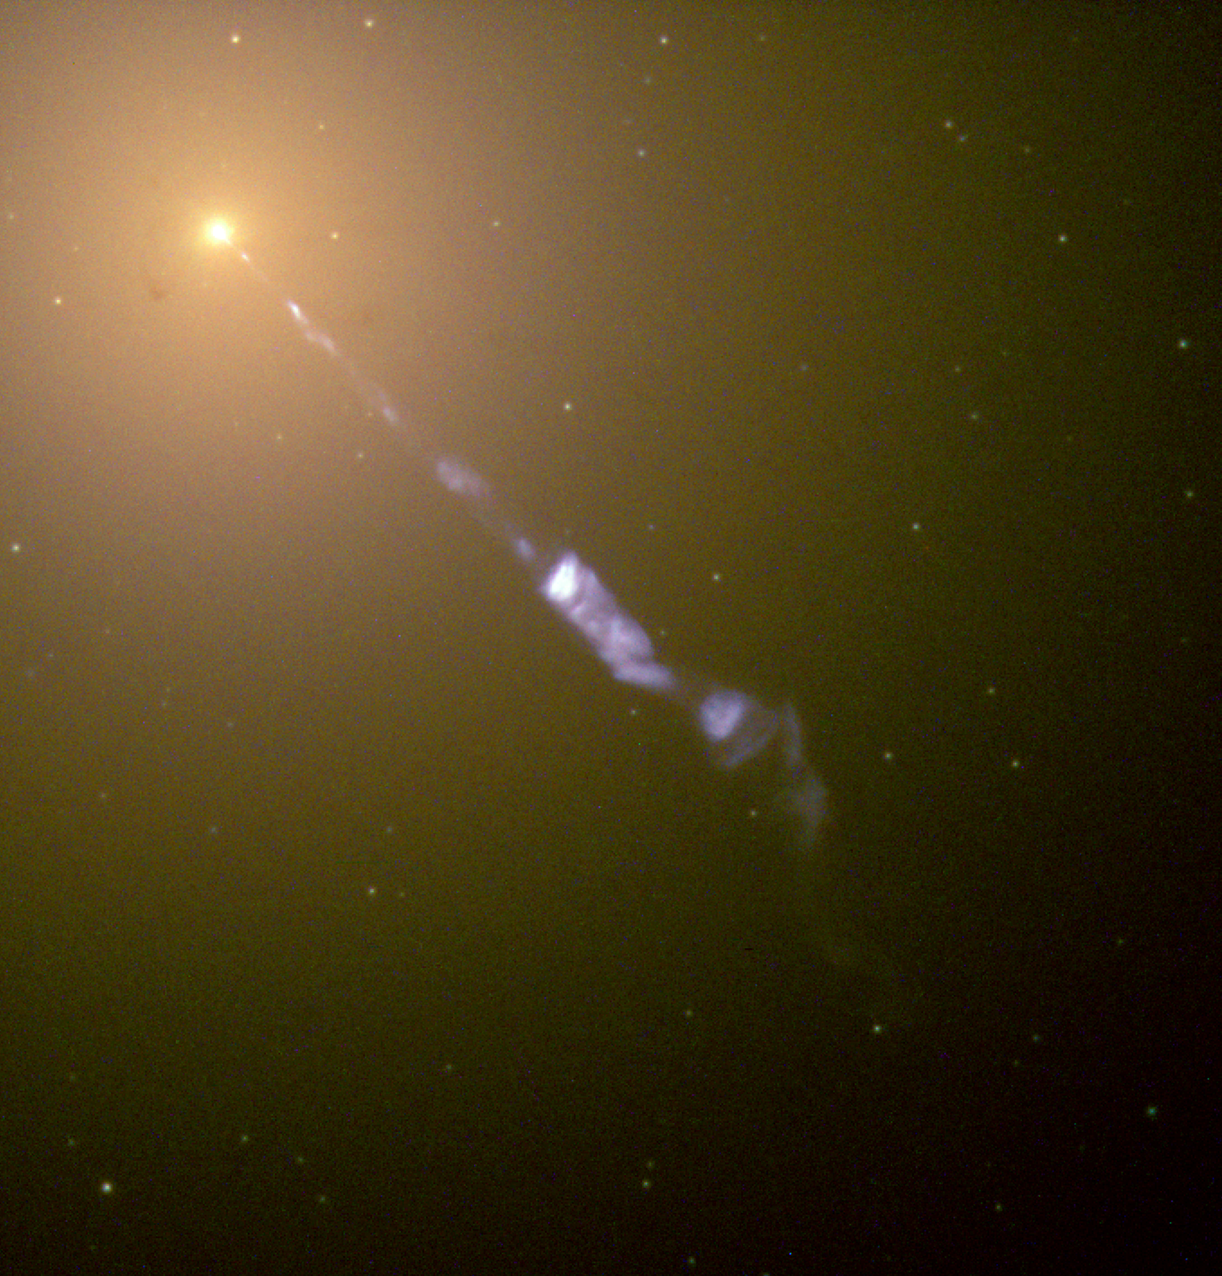

A cosmic searchlight

Streaming out from the centre of the galaxy M87 like a cosmic searchlight is one of nature's most amazing phenomena, a black-hole-powered jet of electrons and other sub-atomic particles traveling at nearly the speed of light. In this Hubble telescope image, the blue jet contrasts with the yellow glow from the combined light of billions of unseen stars and the yellow, point-like clusters of stars that make up this galaxy. Lying at the centre of M87, the monstrous black hole has swallowed up matter equal to 2 billion times our Sun's mass. M87 is 50 million light-years from Earth.

Credit: The Hubble Heritage Team (STScI/AURA) and NASA/ESA